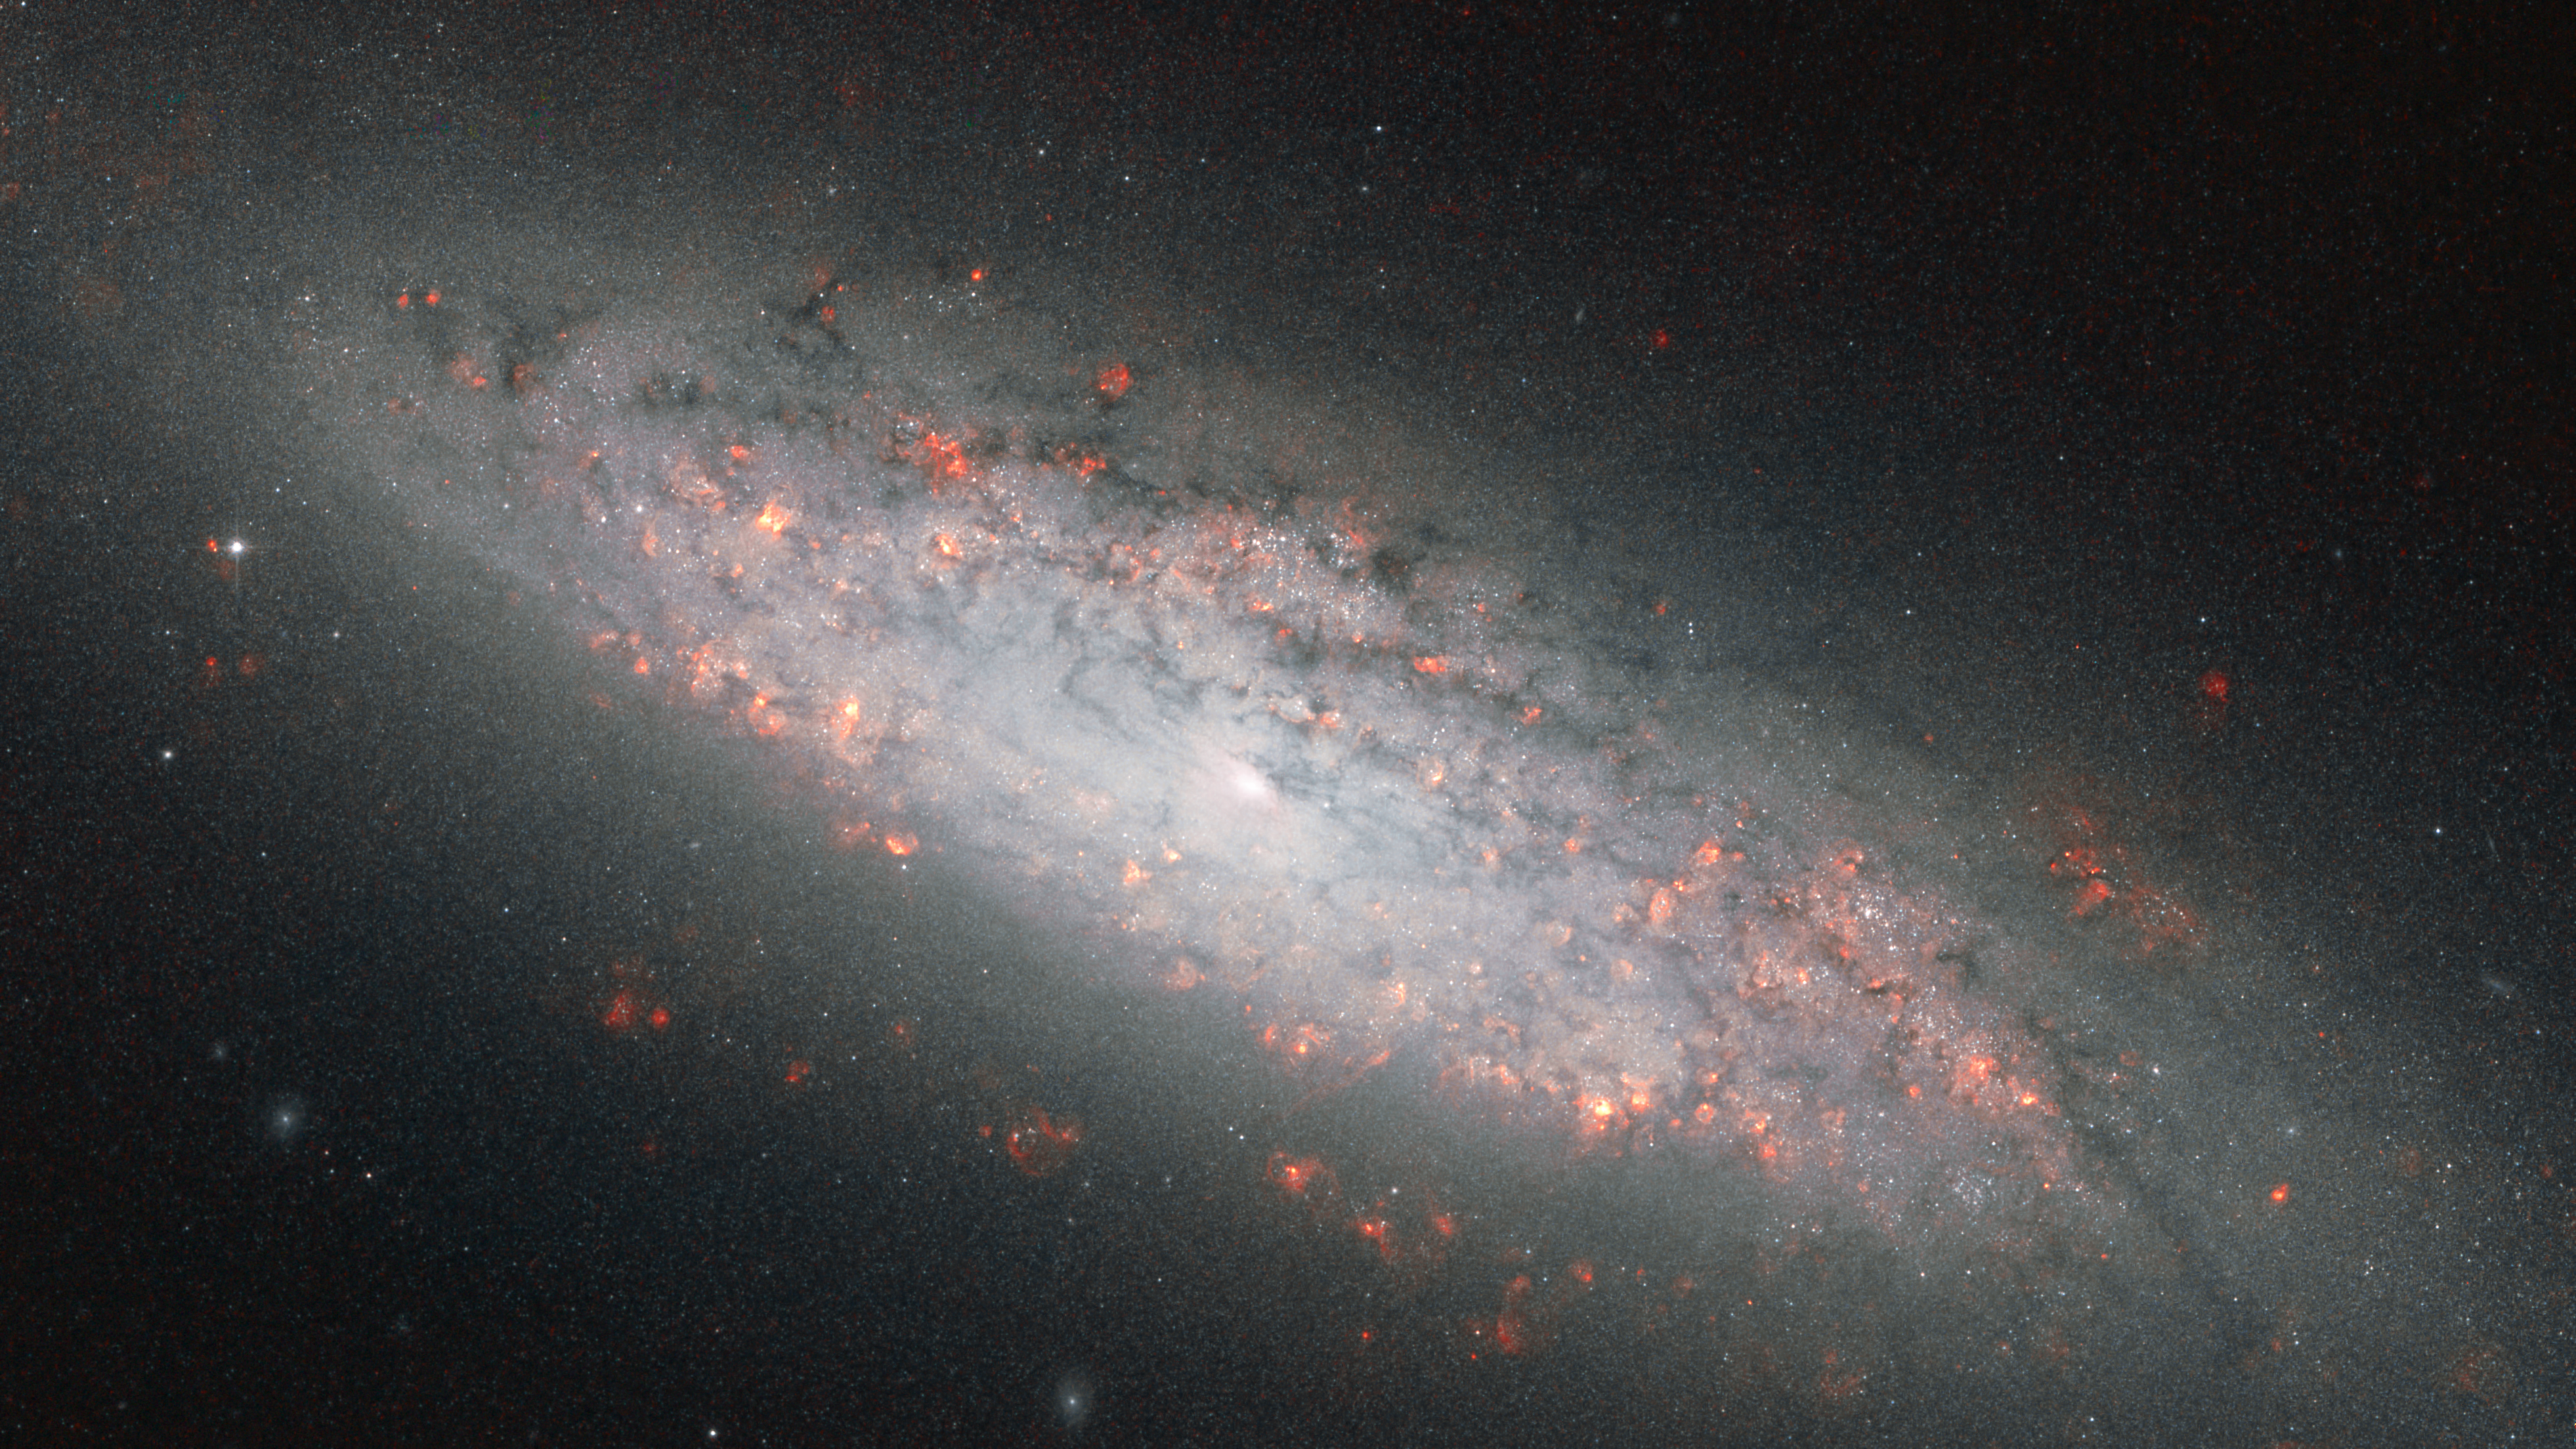

At the edge of the abyss

Fresh starbirth infuses the galaxy NGC 6503 with a vital pink glow in this image from the NASA/ESA Hubble Space Telescope. This galaxy, a smaller version of the Milky Way, is perched near a great void in space where few other galaxies reside.

This new image from Hubble’s Advanced Camera for Surveys displays, with particular clarity, the pink-coloured puffs marking where stars have recently formed in NGC 6503's swirling spiral arms. Although structurally similar to the Milky Way, the disc of NGC 6503 spans just 30 000 light-years, or just about a third of the size of the Milky Way, leading astronomers to classify NGC 6503 as a dwarf spiral galaxy.

NGC 6503 lies approximately 17 million light-years away in the constellation of Draco (the Dragon). The German astronomer Arthur Auwers discovered this galaxy in July 1854 in a region of space where few other luminous bodies have been found.

NGC 6503 sits at the edge of a giant, hollowed-out region of space called the Local Void. The Hercules and Coma galaxy clusters, as well as our own Local Group of galaxies, circumscribe this vast, sparsely populated region. Estimates for the void’s diameter vary from 30 million to more than 150 million light-years — so NGC 6503 does not have a lot of galactic company in its immediate vicinity.

The isolation of NGC 6503 inspired the stargazer Stephen James O'Meara to name it the Lost-In-Space Galaxy in his book Hidden Treasures.

This Hubble image was created from exposures taken with the Wide Field Channel of the Advanced Camera for Surveys. The filters were unusual, which explains the peculiar colour balance of this picture. The red colouration derives from a 28-minute exposure through a filter that just allows the emission from hydrogen gas (F658N) to pass and which reveals the glowing clouds of gas associated with star-forming regions. This was combined with a 12-minute exposure through a near-infrared filter (F814W), which was coloured blue for contrast. The field of view is 3.3 by 1.8 arcminutes.

Credit: ESA/Hubble and NASA